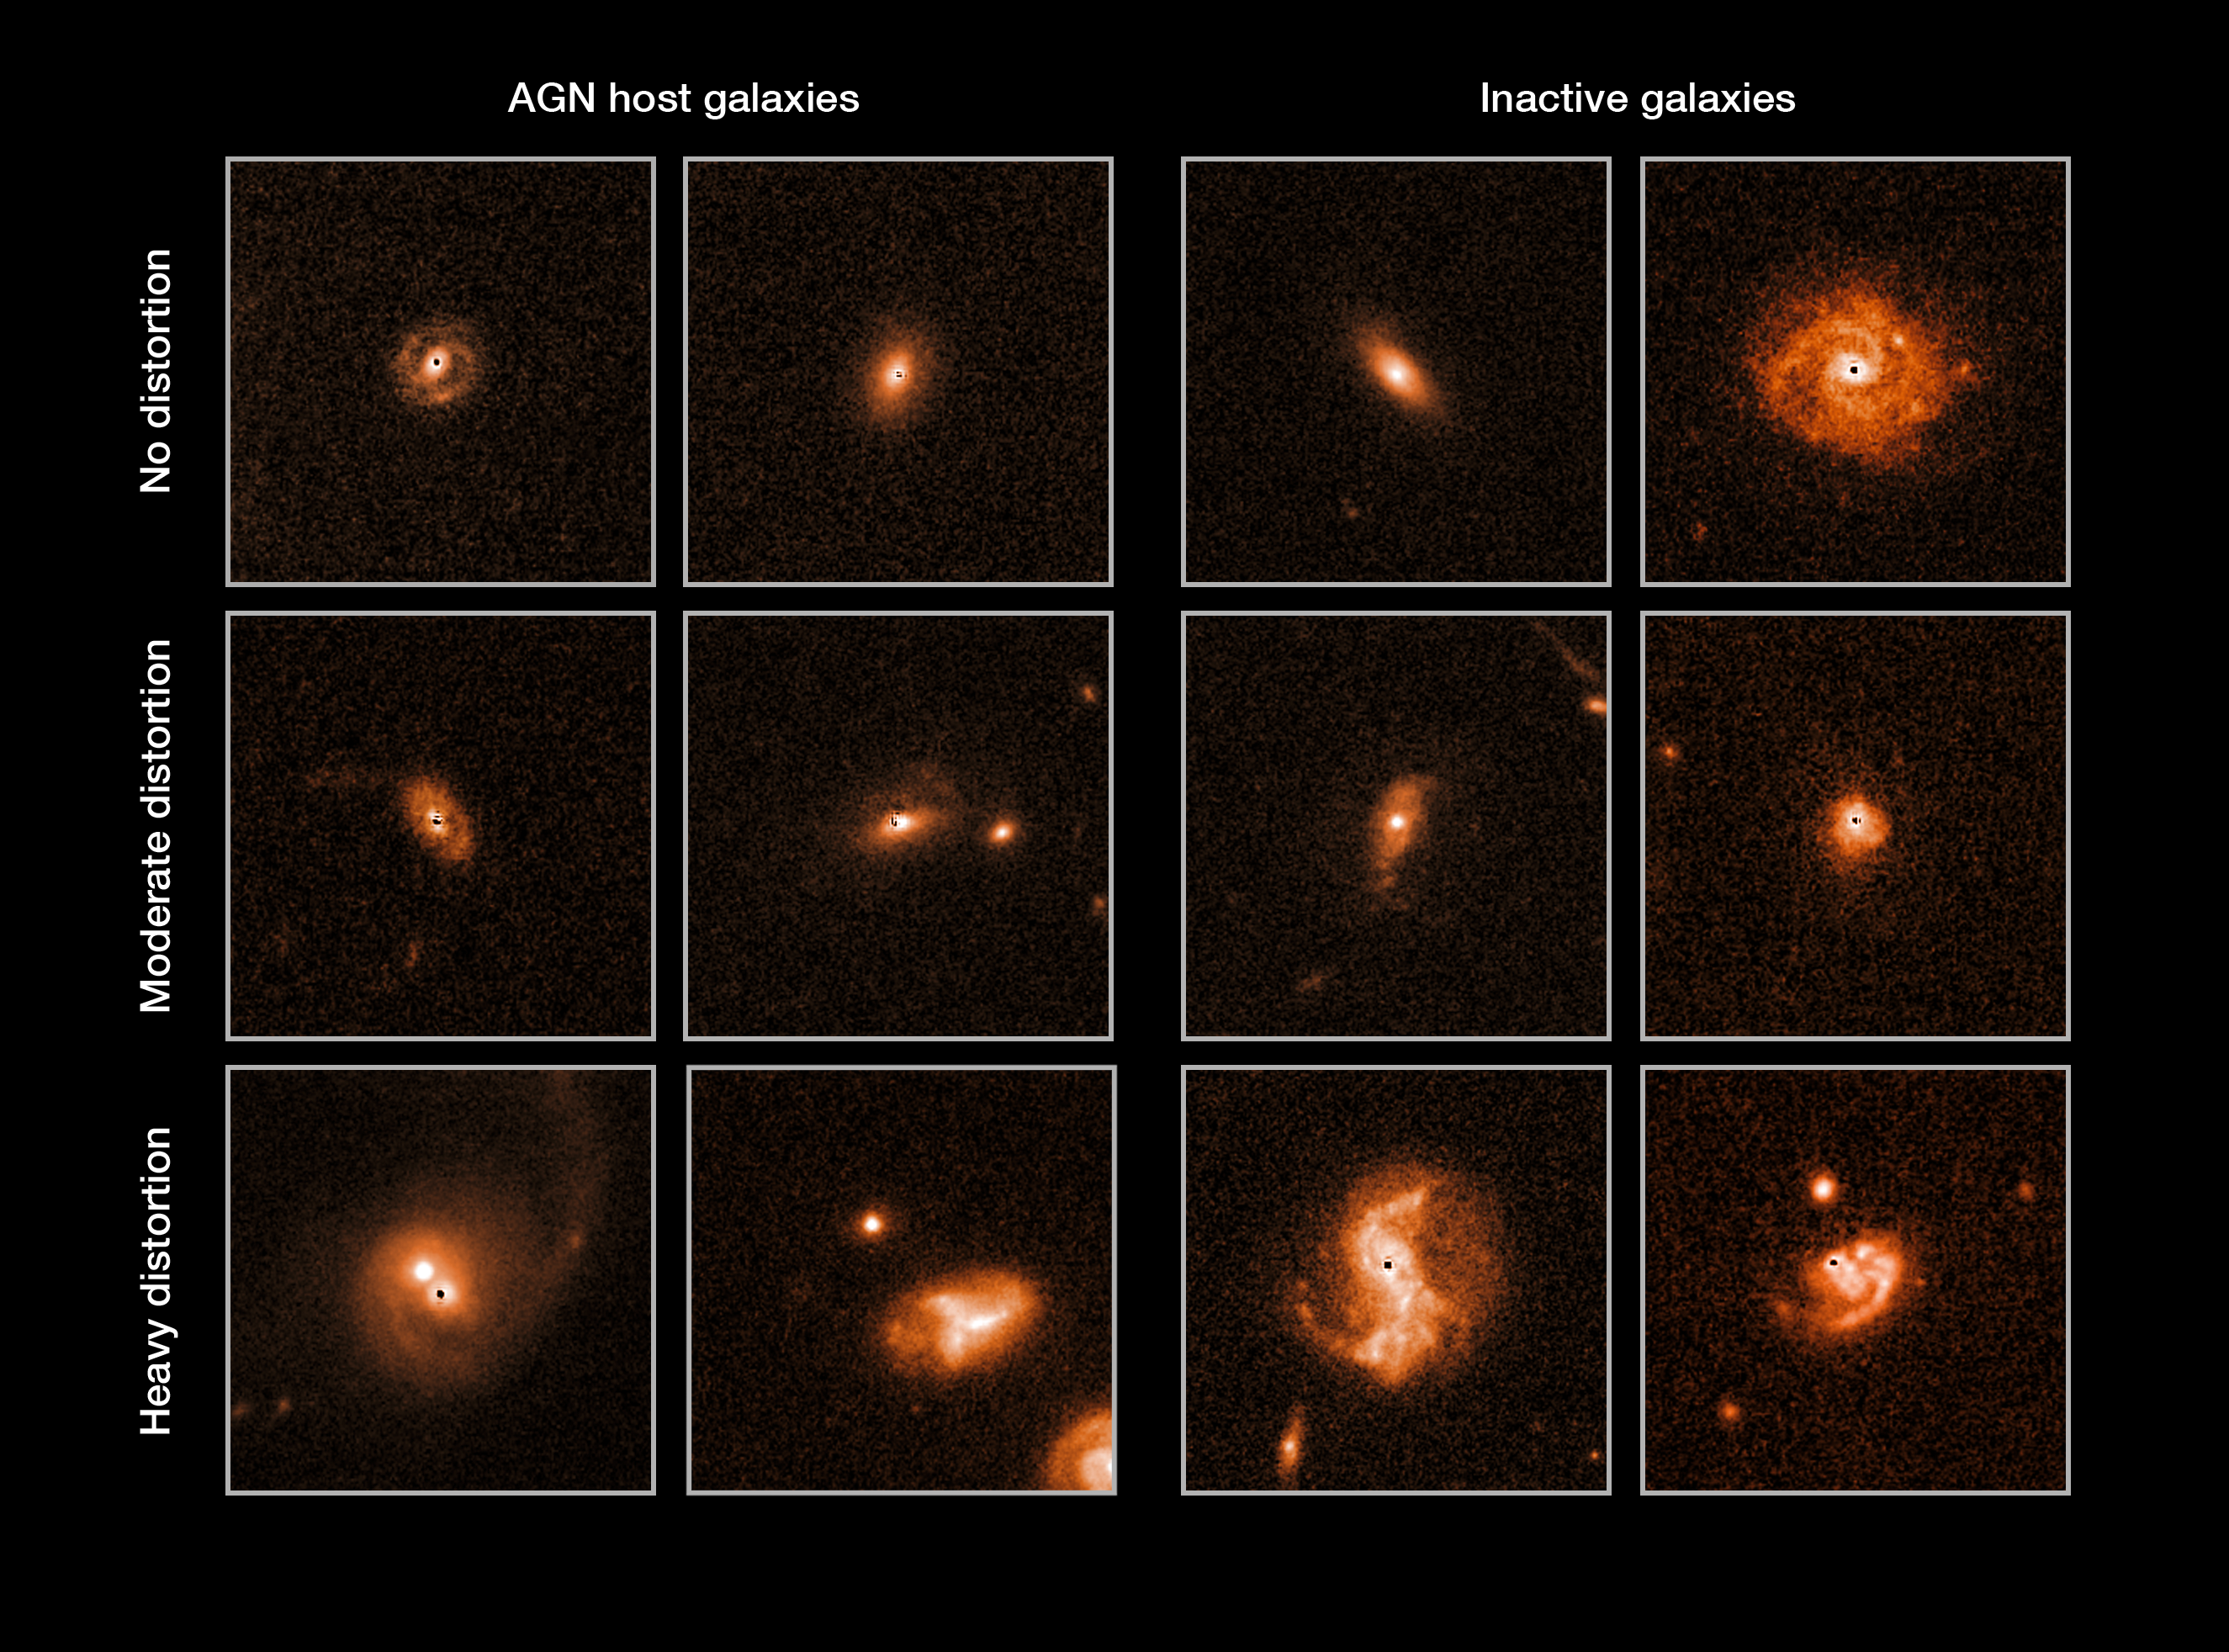

Selected galaxies from the COSMOS survey

A team of astronomers studied over 1400 galaxies snapped by Hubble in the COSMOS survey, to test the hypothesis that galactic mergers trigger active galactic nuclei (AGN). In order to make this a blind test, the team modelled and removed the active nucleus (which normally appears as a bright spot) from each galaxy, and then cosmetically added a similar mark to the galaxies without an AGN, to make them visually indistinguishable. This explains the black dot visible near the centre of each of these images.

They then categorised the galaxies, according to whether they showed no sign of recent mergers (top), minor signs (middle row) or clear signs of disruption from a recent merger (bottom).

Analysing these results, they found that galaxies with active nuclei (left) and those with inactive nuclei (right) showed no statistically significant difference in the proportion that had undergone mergers. This means that processes other than galactic mergers must trigger AGN activity.

Credit: NASA, ESA, M. Cisternas (Max-Planck Institute for Astronomy)